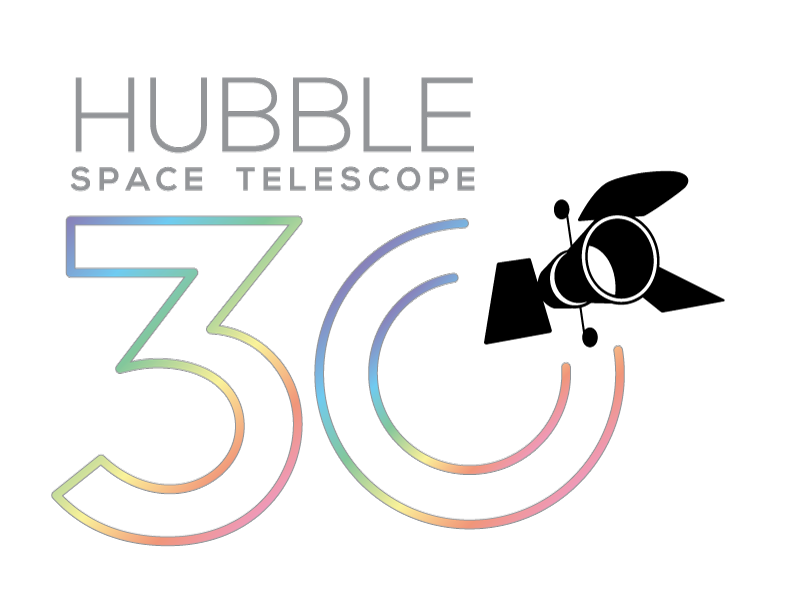

Celebrating 30 years of the NASA/ESA Hubble Space Telescope

Banner designed for the celebration of the30 years of the NASA/ESA Hubble Space Telescope.

Credit: NASA & ESA